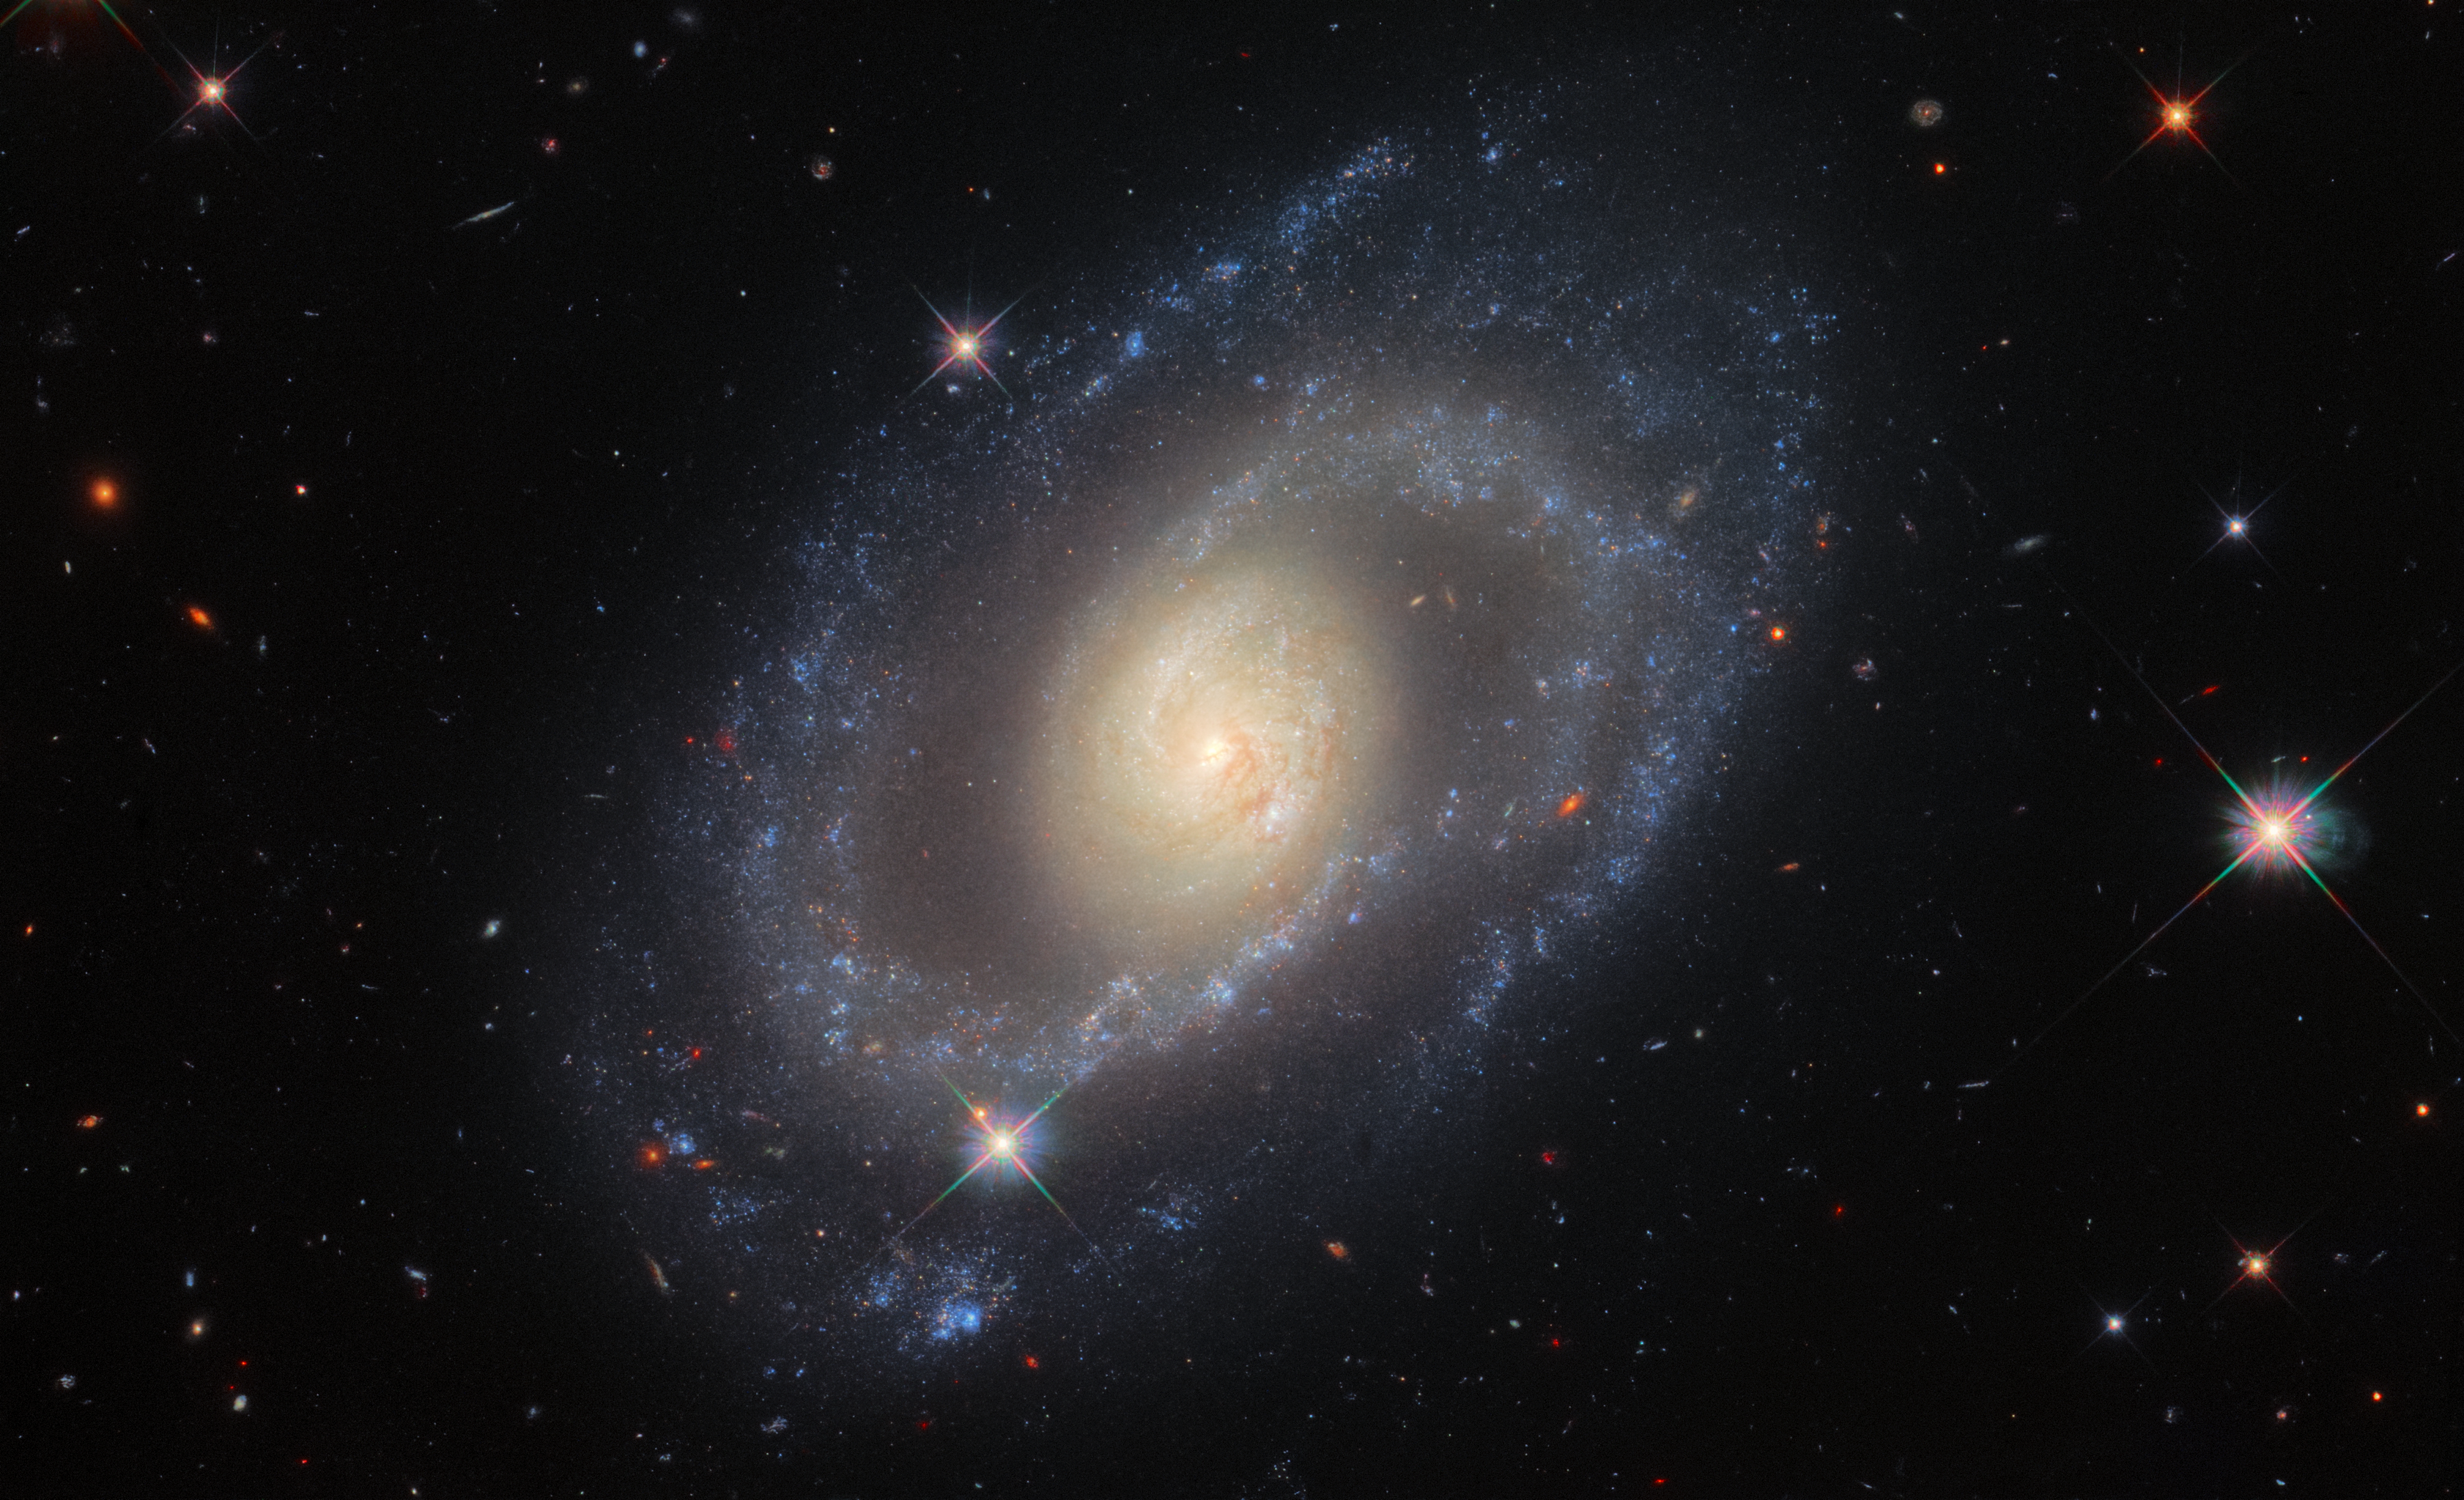

Cosmological Curiosity

This image from the NASA/ESA Hubble Space Telescope features the spiral galaxy Mrk 1337, which is roughly 120 million light-years away from Earth in the constellation Virgo. Hubble’s Wide Field Camera 3 snapped Mrk 1337 at a wide range of ultraviolet, visible and infrared wavelengths, producing this richly detailed image. Mrk 1337 is a weakly barred spiral galaxy, which as the name suggests means that the spiral arms radiate from a central bar of gas and stars. Bars occur in roughly half of spiral galaxies, including our own galaxy the Milky Way.

These observations are part of a campaign to improve our knowledge of how fast the universe is expanding. They were proposed by Adam Riess, who was awarded a Nobel Laureate in physics 2011 for his contributions to the discovery of the accelerating expansion of the Universe, alongside Saul Perlmutter and Brian Schmidt.

Credit: ESA/Hubble & NASA, A. Riess et al.